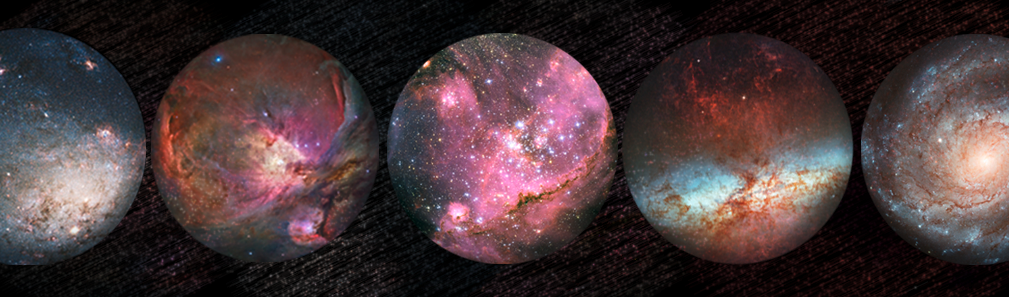

Banner for new ESA/Hubble fulldome clips

ESA/Hubble is releasing a series of stunning fulldome clips, freely available to planetariums across the globe as part of the 25th anniversary celebrations. The clips are in 4k and 8k fulldome format and rendered for uni-directional domes.

Today the first four clips have been released and can be downloaded from the website. Another clip will be released on the 24th of each month until the end of the year, so don’t forget to keep checking.

Credit: NASA & ESA